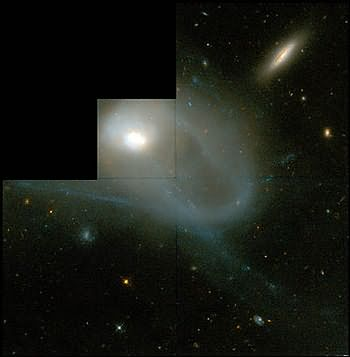

HST/WFPC2 image of galaxy NGC 3921

The Hubble telescope has uncovered over 1,000 bright; young star clusters bursting to life in a brief, intense, brilliant "fireworks show" at the heart of a pair of colliding galaxies.

Credit: Brad Whitmore (STScI)